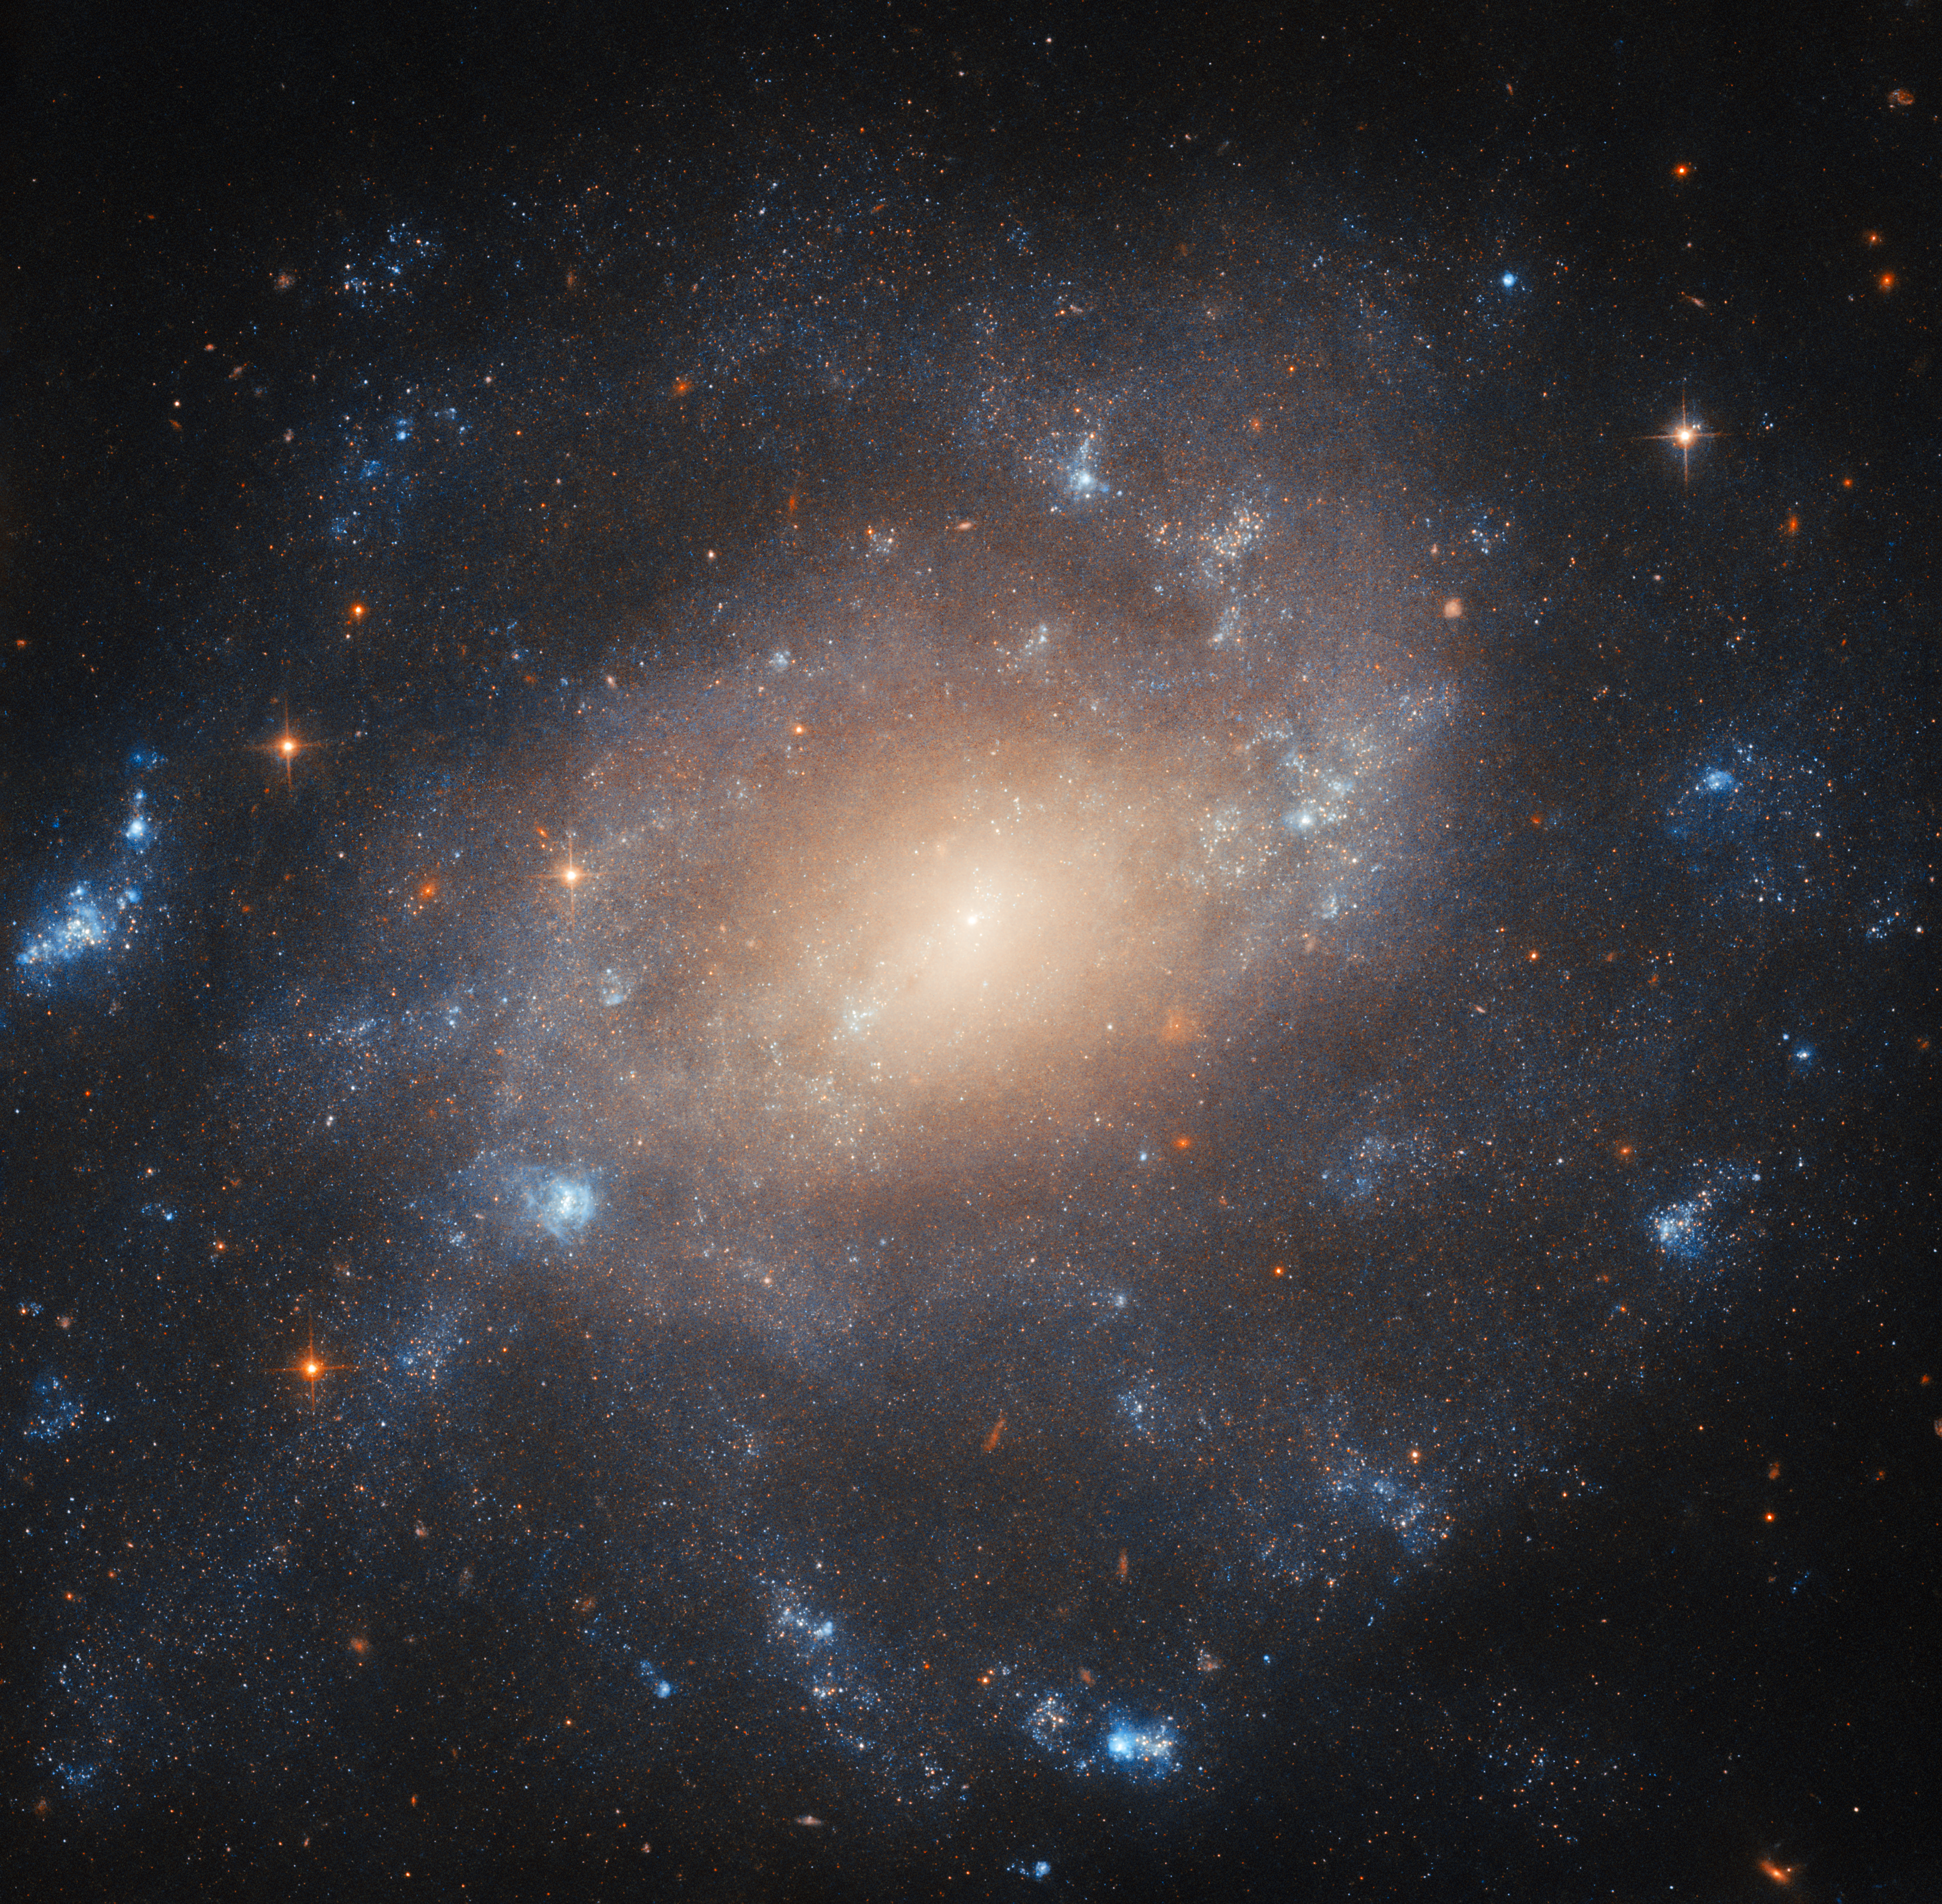

Captured on glass

This Hubble Picture of the Week depicts the spiral galaxy ESO 422-41, which lies about 34 million light-years from Earth in the constellation Columba. The patchy, star-filled structure of the galaxy’s spiral arms and the glow from its dense core are laid out in intricate detail here by Hubble’s Advanced Camera for Surveys. Images of this galaxy have, however, a decades-long history.

The name ESO 422-41 comes from its identification in the European Southern Observatory (B) Atlas of the Southern Sky. In the times before automated sky surveys with space observatories such as ESA’s Gaia, many stars, galaxies and nebulae were discovered by means of large photographic surveys. Astronomers used the most advanced large telescopes of the time to produce hundreds of photographs, covering an area of the sky. They later studied the resulting photographs, attempting to catalogue all the new astronomical objects revealed.

In the 1970s a new telescope at ESO’s La Silla facility in Chile performed such a survey of the southern sky, which still had not been examined in as much depth as the sky in the north. At the time, the premier technology for recording images was glass plates treated with chemicals. The resulting collection of photographic plates became the ESO (B) Atlas of the Southern Sky. Astronomers at ESO and in Uppsala, Sweden collaborated to study the plates, recording hundreds of galaxies — ESO 422-41 being just one of those — star clusters, and nebulae. Many were new to astronomy.

Astronomical sky surveying has since transitioned through digital, computer-aided surveys such as the Sloan Digital Sky Survey and the Legacy Surveys, to surveys made by space telescopes including Gaia and the Wide-Field Infrared Survey Explorer. Even so, photographic sky surveys contributed immensely to astronomical knowledge for decades, and the archives of glass plates serve as an important historical reference for large swathes of the sky. Some are still actively used today, for instance to study variable stars through time. And the objects that these surveys revealed, including ESO 422-41, can now be studied in depth by telescopes such as Hubble.

Credit: ESA/Hubble & NASA, C. Kilpatrick